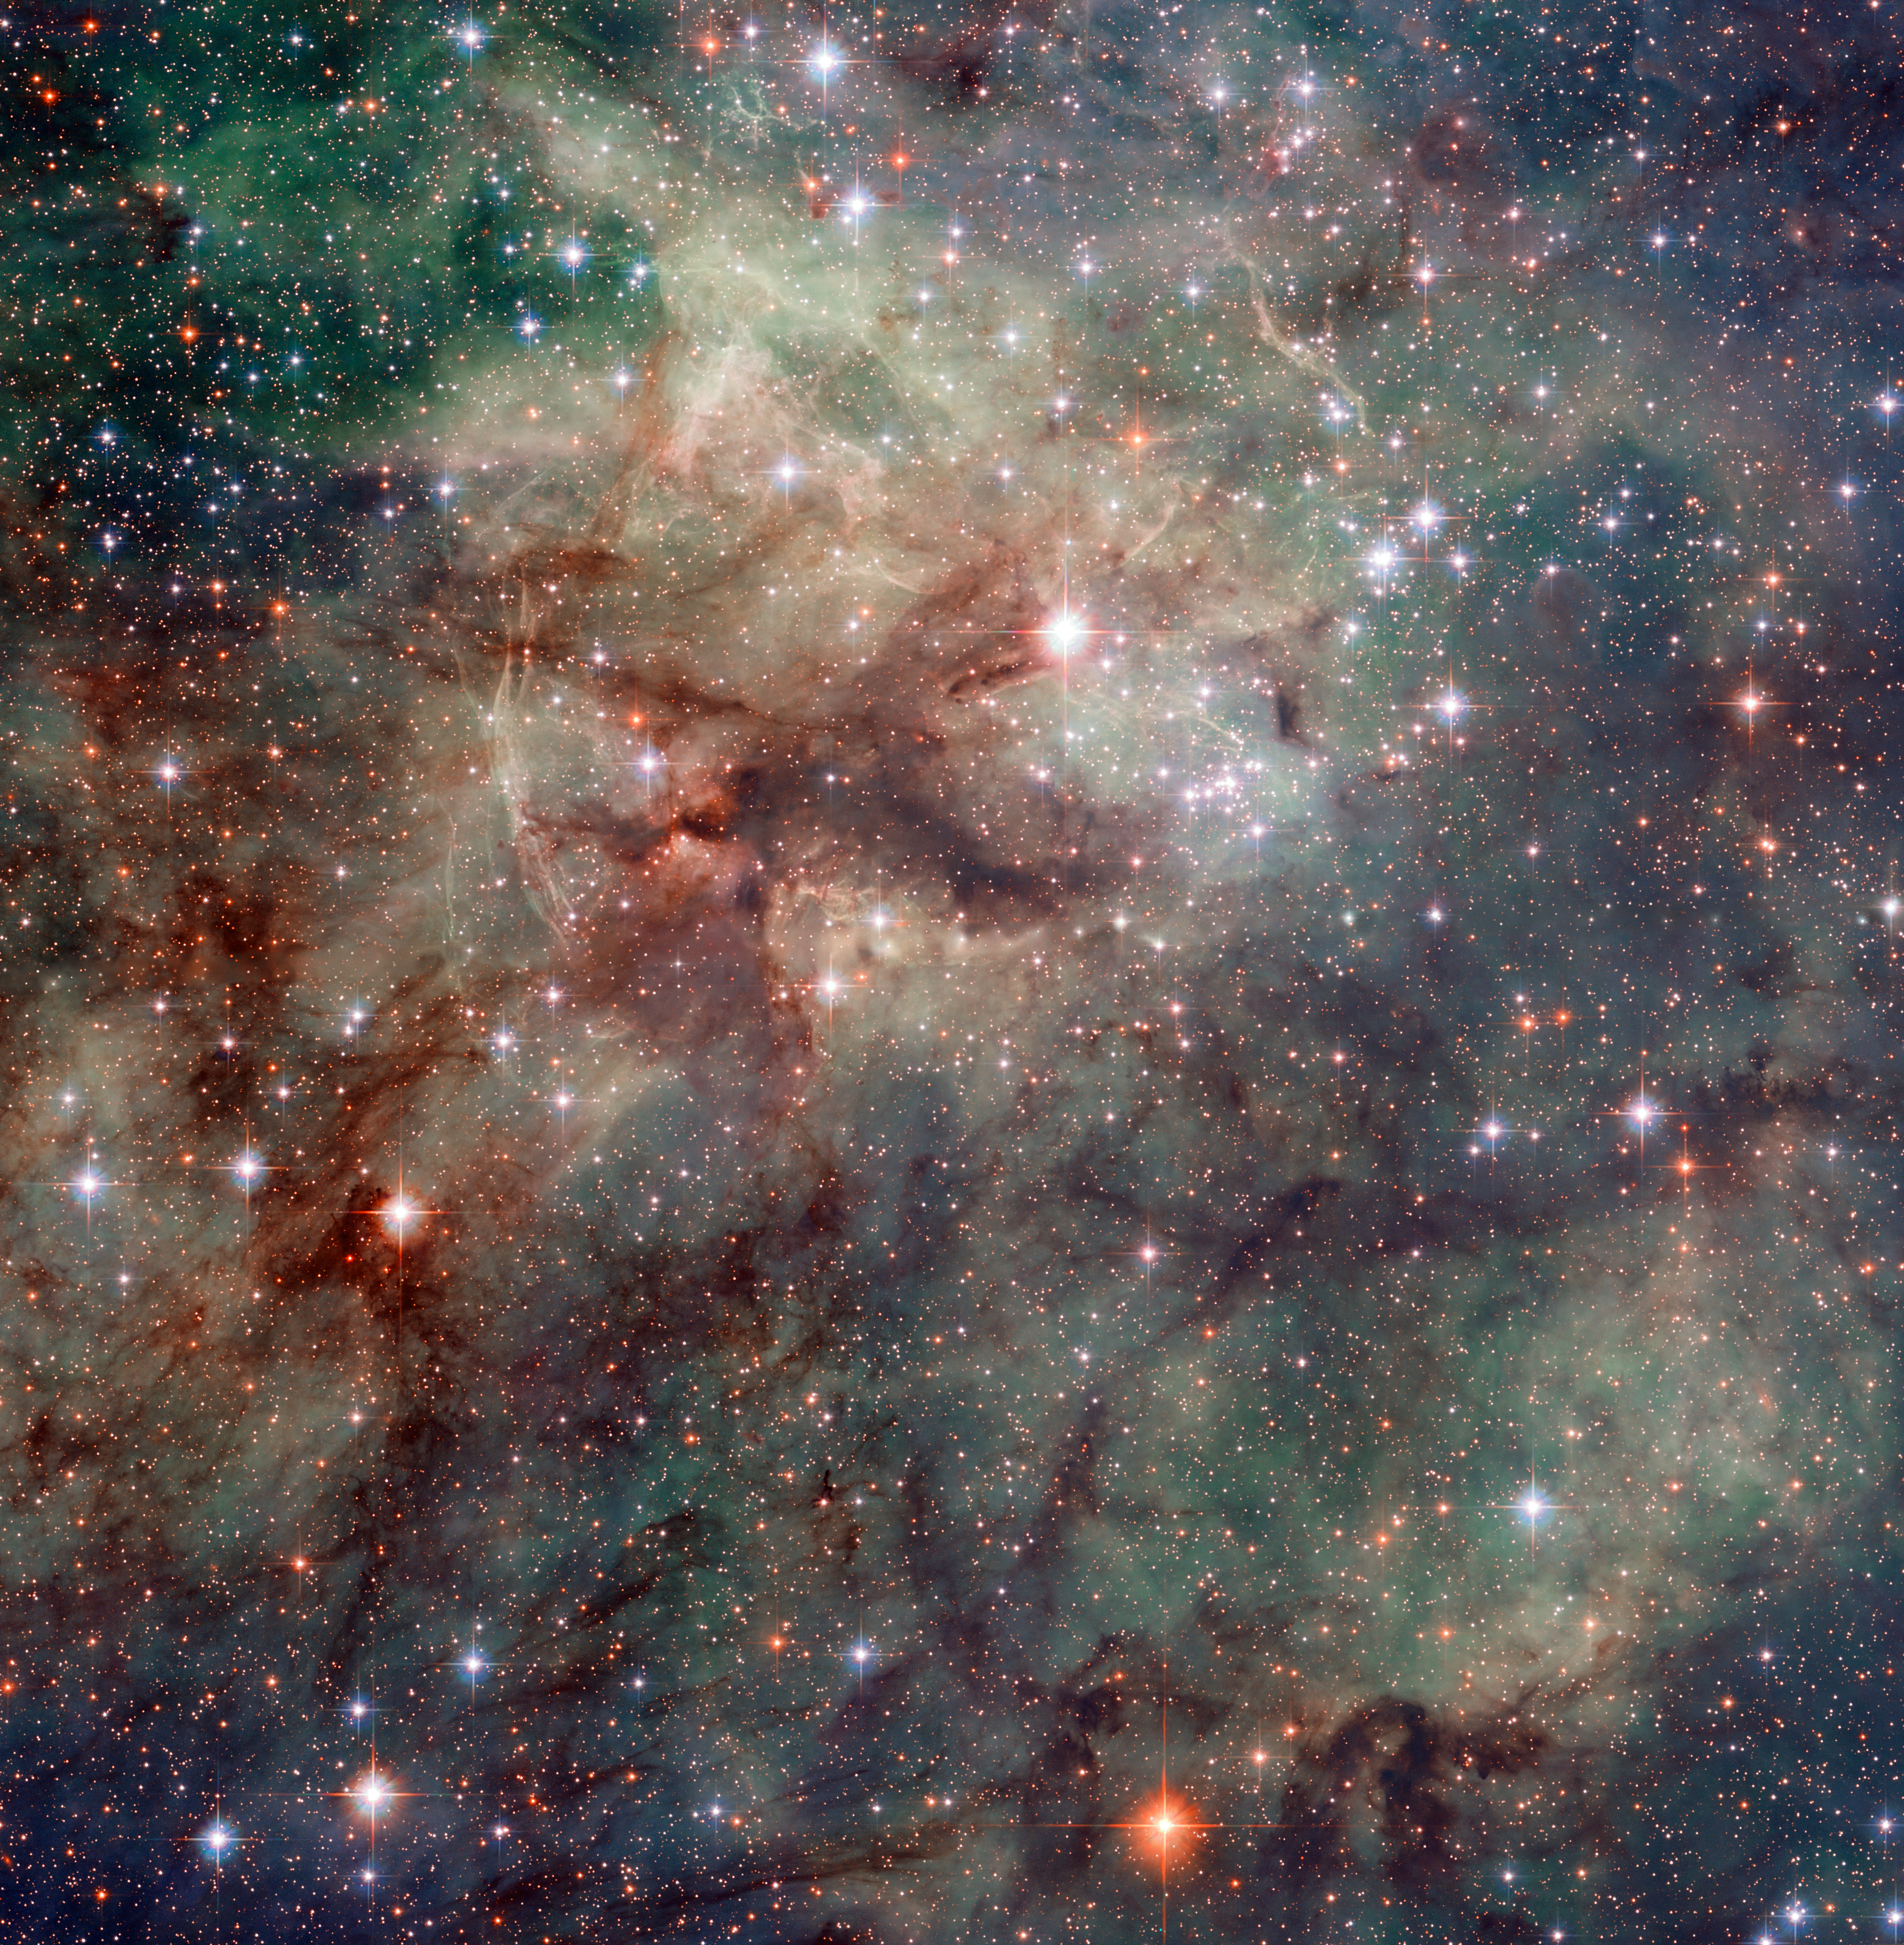

Hubble snaps close-up of the Tarantula

Hubble has taken this stunning close-up shot of part of the Tarantula Nebula. This star-forming region of ionised hydrogen gas is in the Large Magellanic Cloud, a small galaxy which neighbours the Milky Way. It is home to many extreme conditions including supernova remnants and the heaviest star ever found. The Tarantula Nebula is the most luminous nebula of its type in the local Universe.

Credit: NASA, ESA